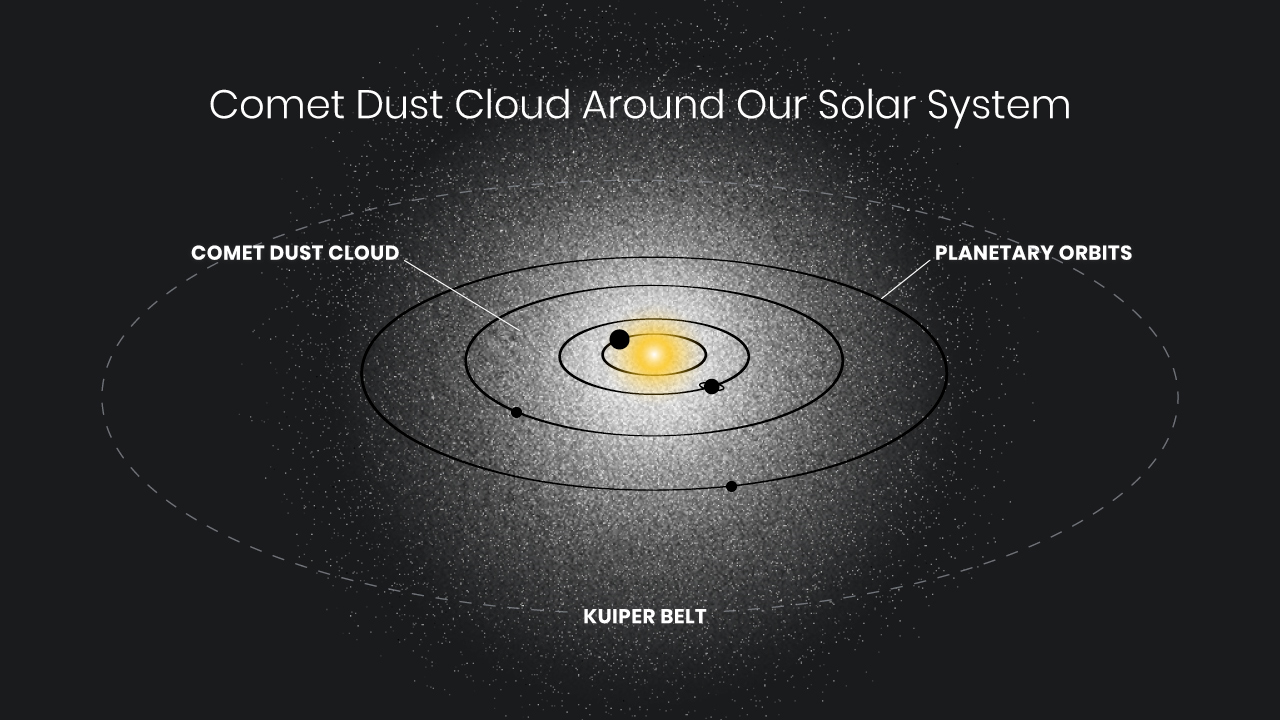

Hubble Detects Ghostly Glow Surrounding Our Solar System

A survey of the residual light in the night sky has uncovered an eerie, omnipresent glow spread throughout the Solar System, thought to be caused by sunlight reflected from cometary dust.

Over its thirty-plus years of operations, astronomers have become accustomed to subtracting the background light from the Solar System from Hubble’s images. They are interested in the faint, discrete objects that are other stars and galaxies. But the SKYSURF team realised that Hubble’s images would be an excellent set of survey data to measure the Solar System’s background light.

The SKYSURF programme used 200,000 images from the NASA/ESA Hubble Space Telescope to look for any residual background light in the sky. This would be any leftover light after subtracting the glow from planets, stars, galaxies, and from dust in the plane of our solar system (called zodiacal light). The excess that they found was extremely faint – equivalent to the steady glow of 10 fireflies spread across the entire sky.

The researchers say that one possible explanation for this residual glow is that our inner solar system contains a tenuous sphere of dust from comets that are falling into the solar system from all directions, and that the glow is sunlight reflecting off this dust. If real, this dust shell could be a new addition to the known architecture of the solar system.

Credit: NASA, ESA, A. James